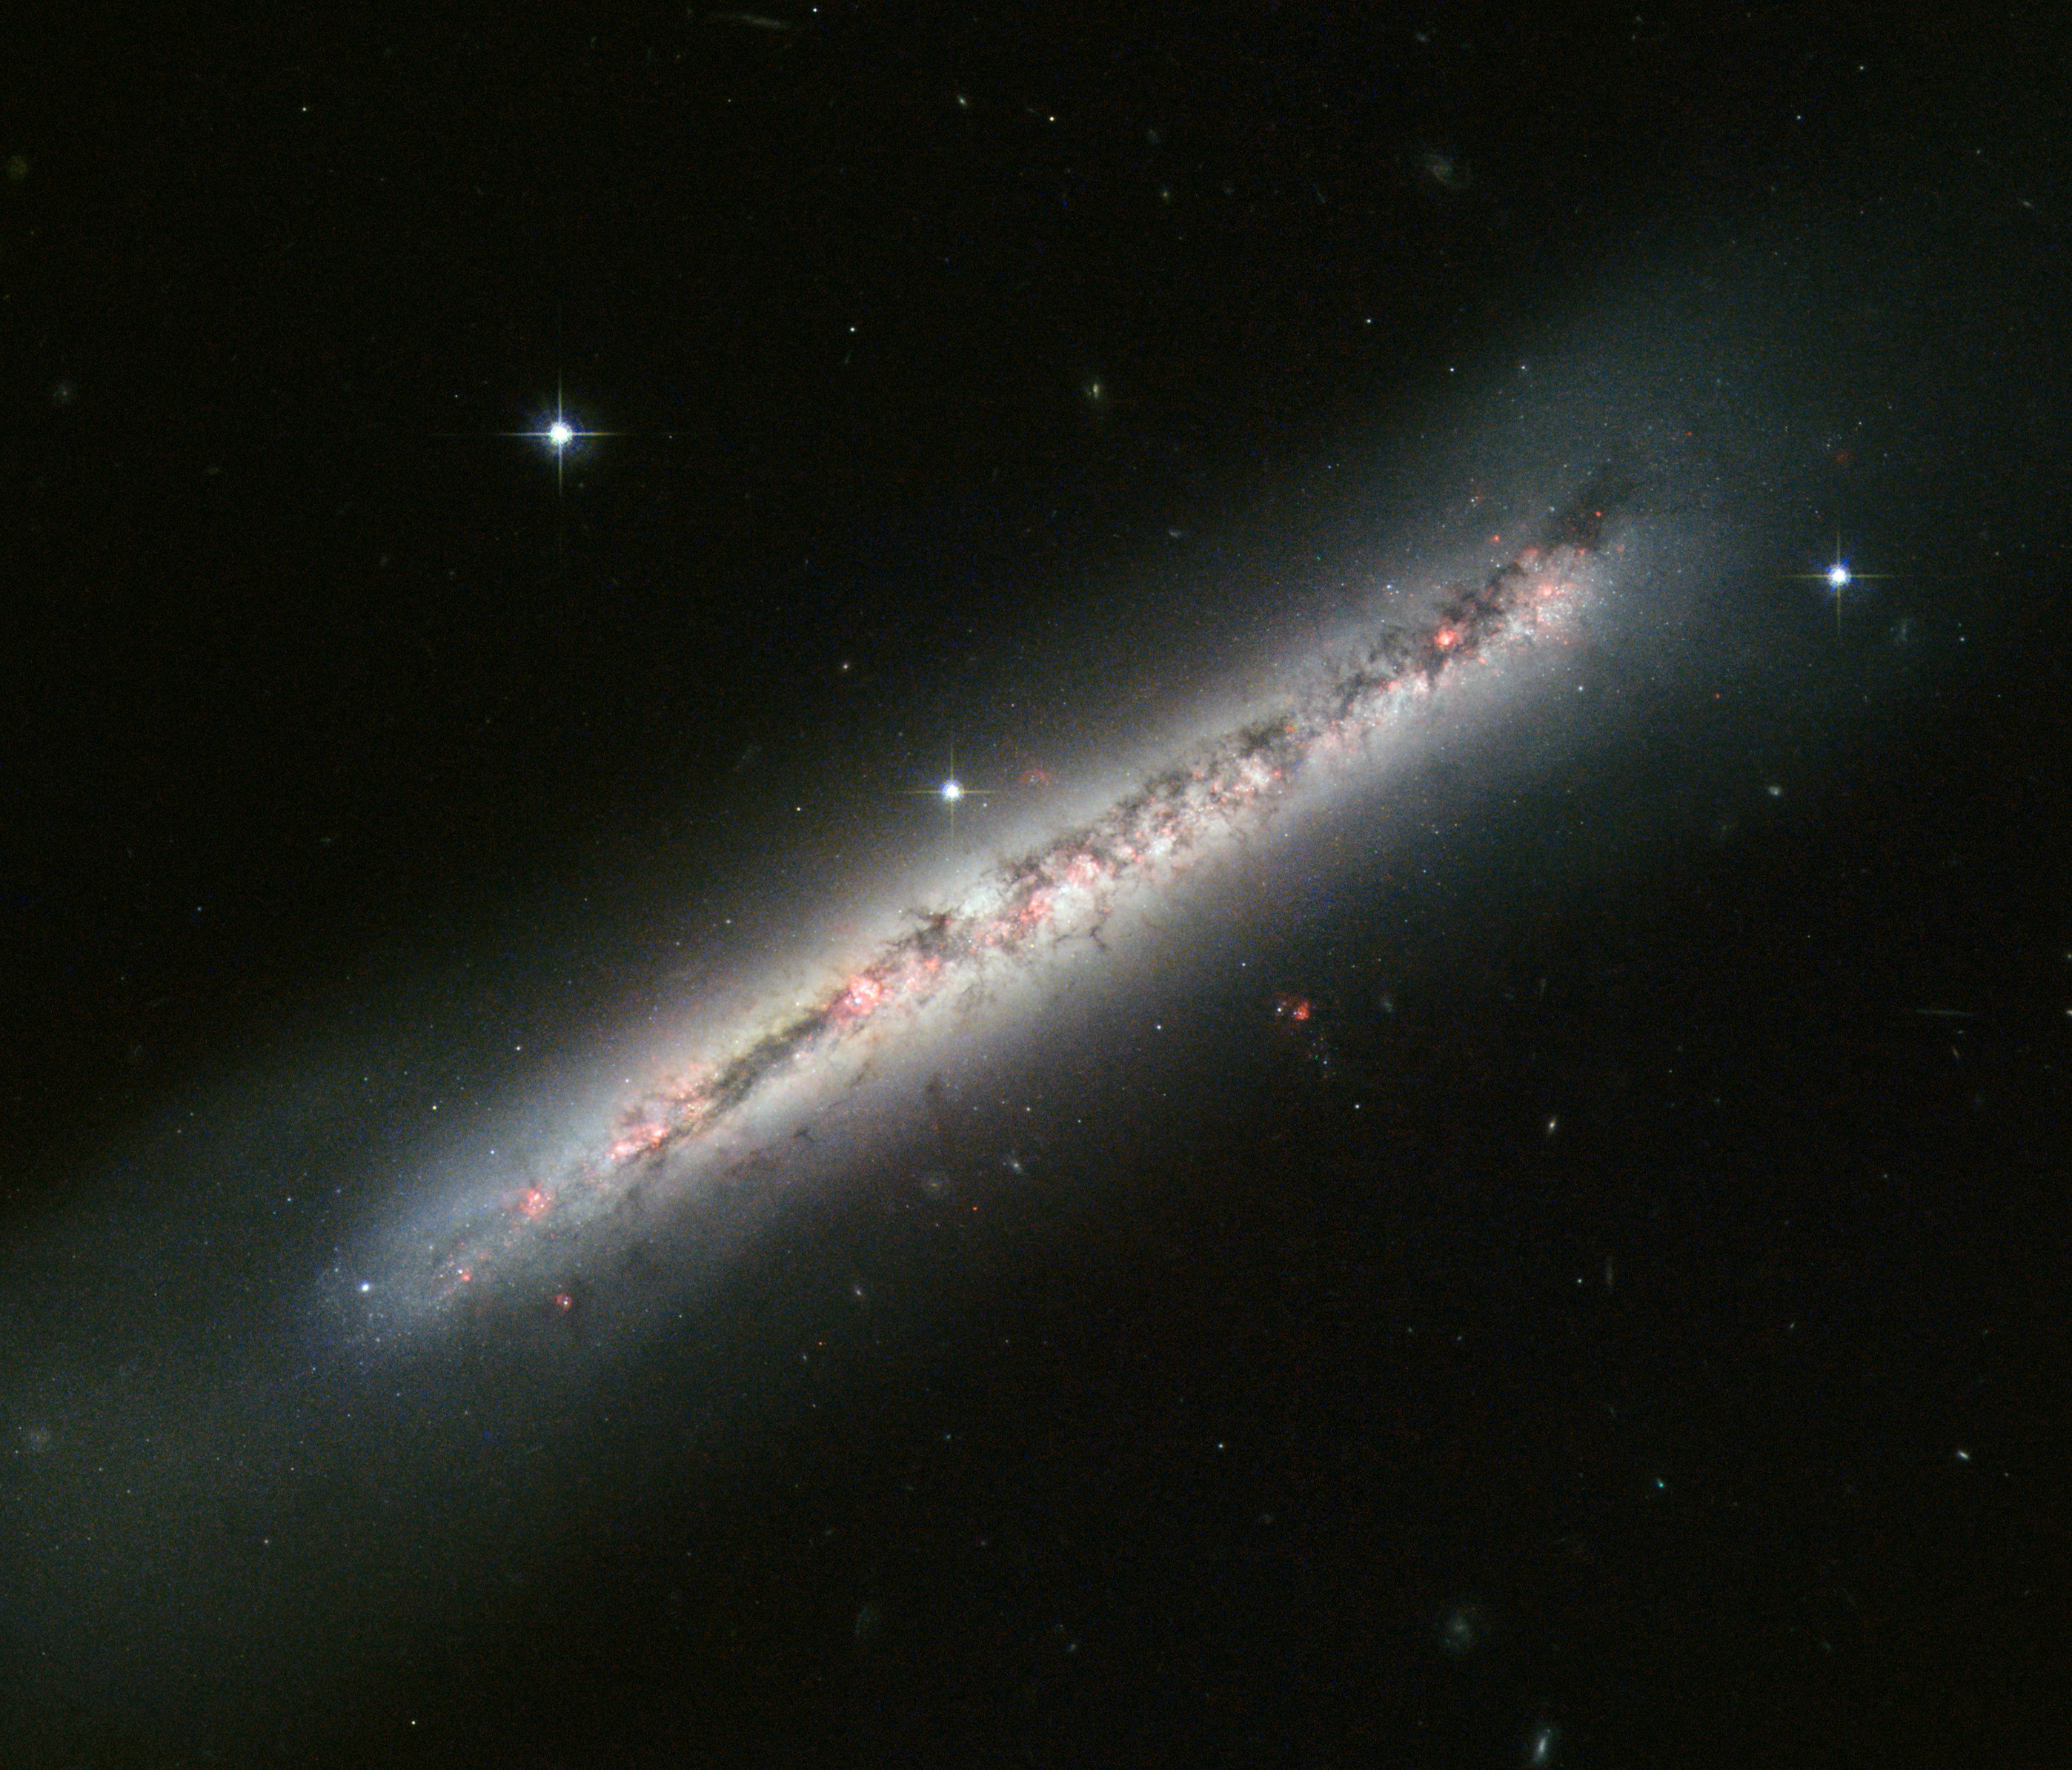

Glowing gas and dark dust in a side-on spiral

The NASA/ESA Hubble Space Telescope has produced a sharp image of NGC 4634, a spiral galaxy seen exactly side-on. Its disc is slightly warped by ongoing interactions with a nearby galaxy, and it is crisscrossed by clearly defined dust lanes and bright nebulae.

NGC 4634, which lies around 70 million light-years from Earth in the constellation of Coma Berenices, is one of a pair of interacting galaxies. Its neighbour, NGC 4633, lies just outside the upper right corner of the frame, and is visible in wide-field views of the galaxy. While it may be out of sight, it is not out of mind: its subtle effects on NGC 4634 are easy to see to a well-trained eye.

Gravitational interactions pull the neat spiral forms of galaxies out of shape as they get closer to each other, and the disruption to gas clouds triggers vigorous episodes of star formation. While this galaxy’s spiral pattern is not directly visible thanks to our side-on perspective, its disc is slightly warped, and there is clear evidence of star formation.

Along the full length of the galaxy, and scattered around parts of its halo, are bright pink nebulae. Similar to the Orion Nebula in the Milky Way, these are clouds of gas that are gradually coalescing into stars. The powerful radiation from the stars excites the gas and makes it light up, much like a fluorescent sign. The large number of these star formation regions is a telltale sign of gravitational interaction.

The dark filamentary structures that are scattered along the length of the galaxy are caused by cold interstellar dust blocking some of the starlight.

Hubble’s image is a combination of exposures in visible light produced by Hubble’s Advanced Camera for Surveys and the Wide Field and Planetary Camera 2.

Credit: ESA/Hubble & NASA